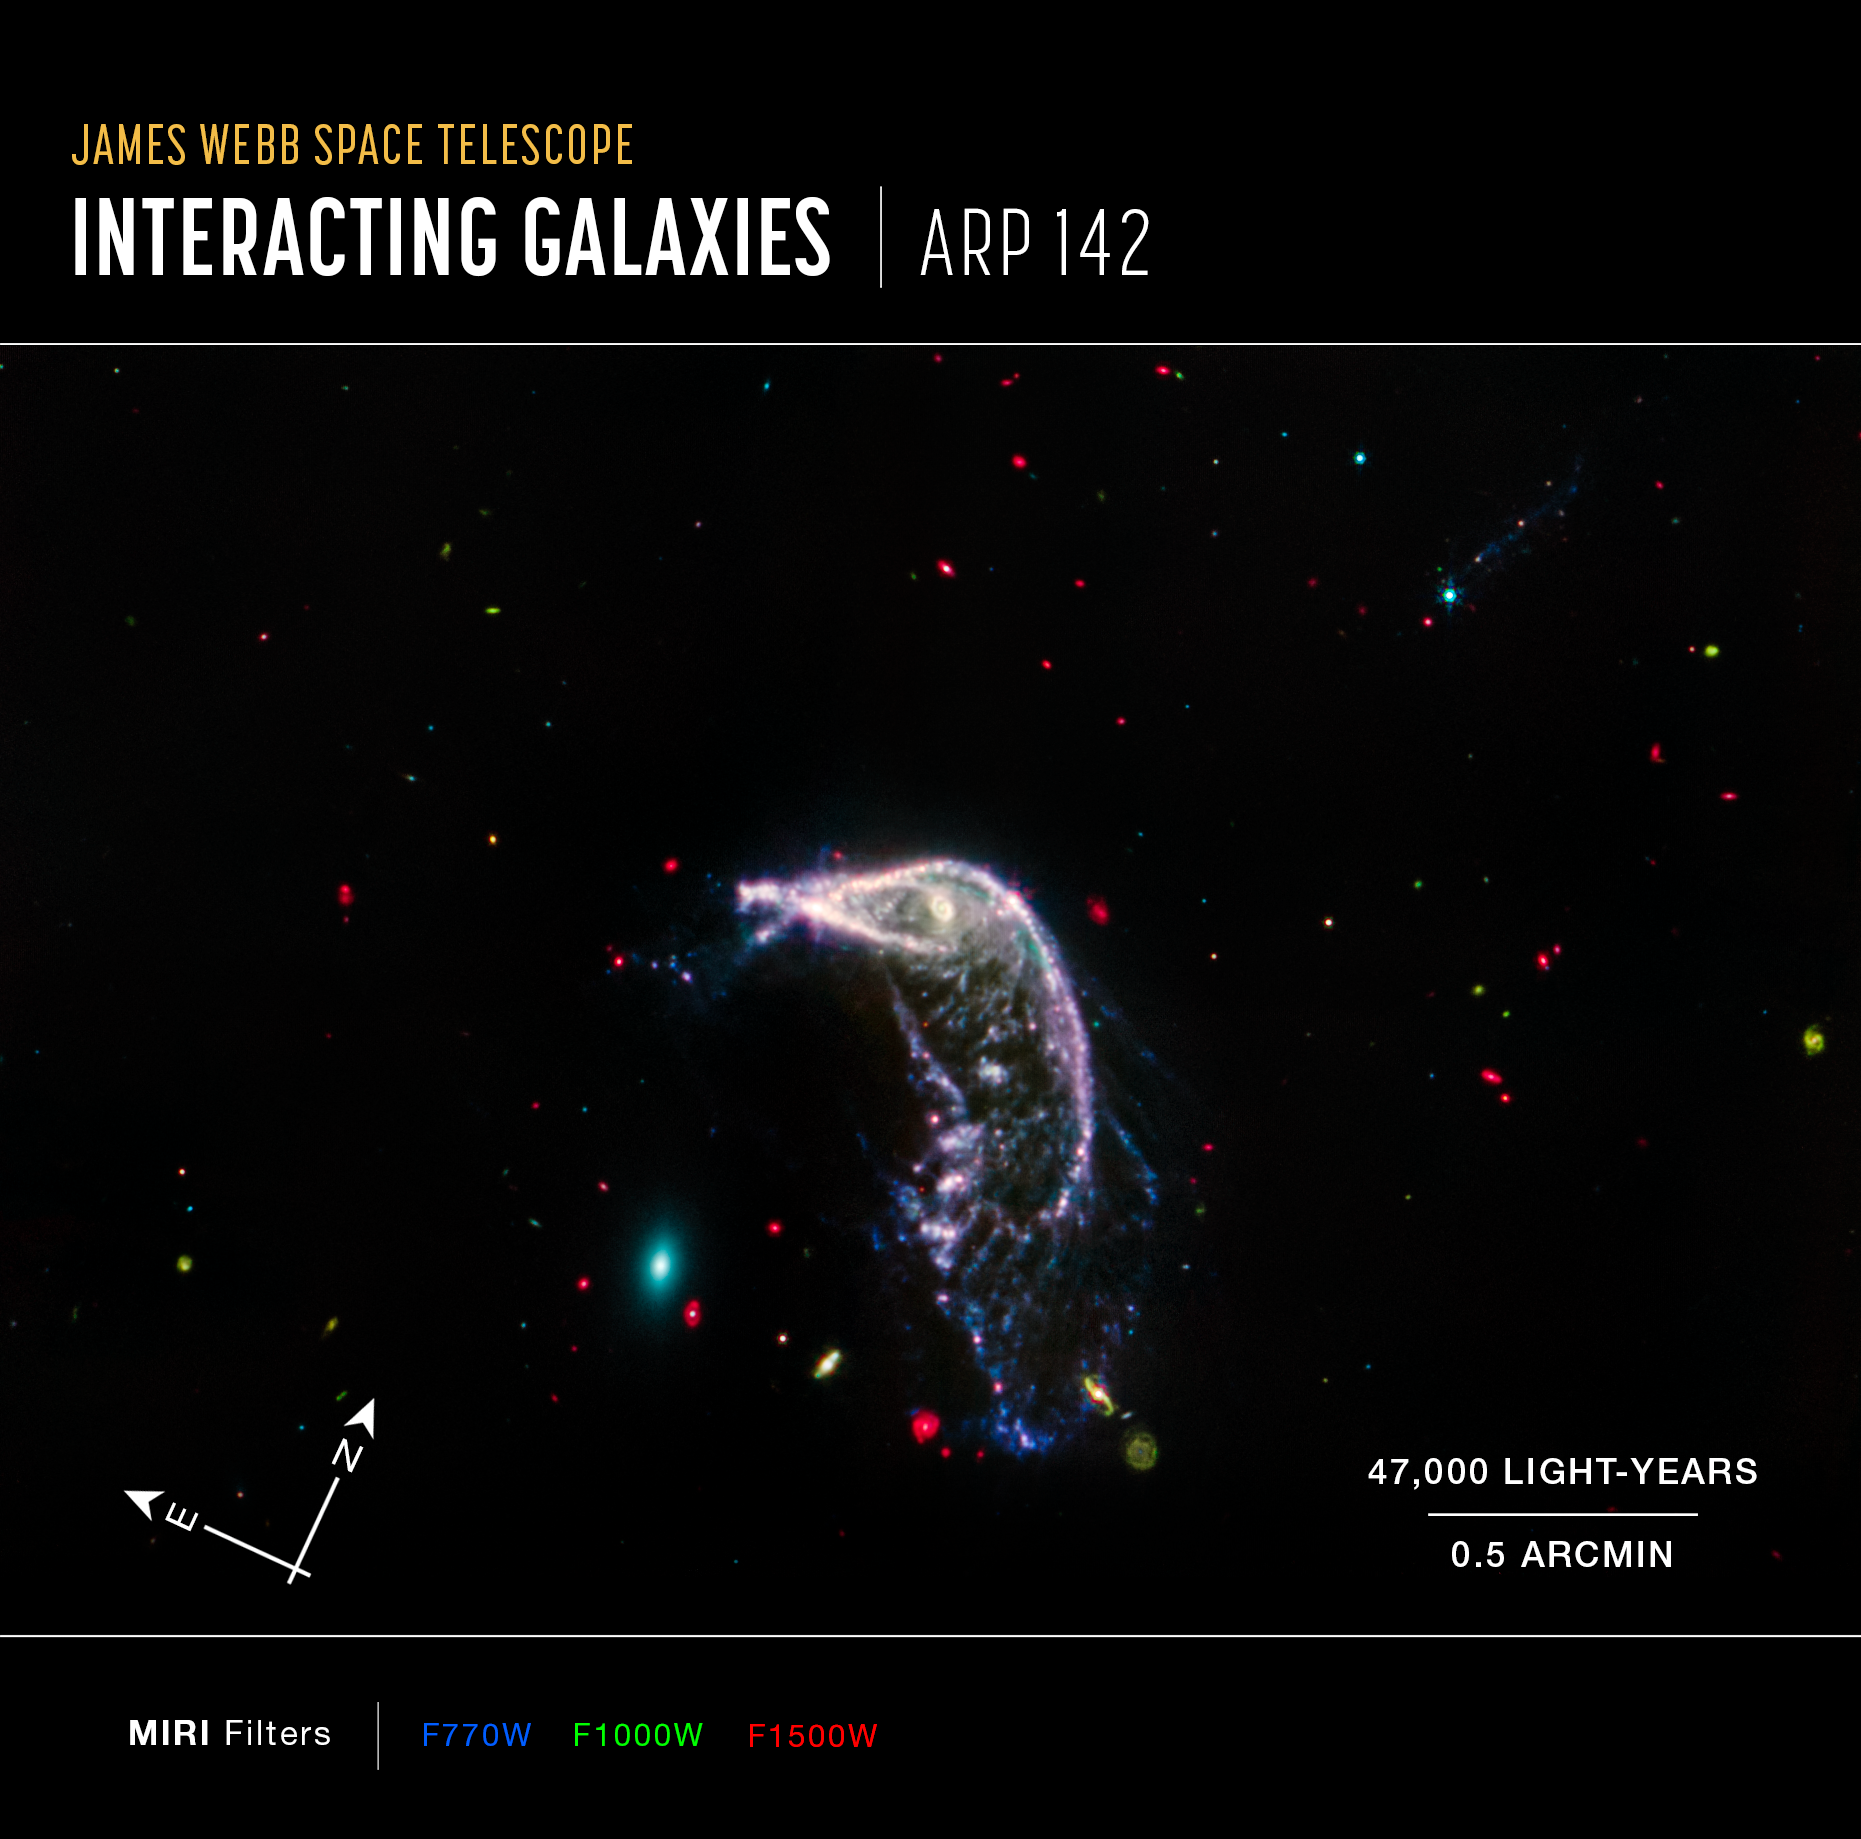

Interacting galaxies Arp 142 (MIRI image, annotated)

This image of interacting galaxies Arp 142, captured by the James Webb Space Telescope’s MIRI (Mid-Infrared Instrument), shows compass arrows, scale bar, and colour key for reference.

The north and east compass arrows show the orientation of the image on the sky. Note that the relationship between north and east on the sky (as seen from below) is flipped relative to direction arrows on a map of the ground (as seen from above).

The scale bar is labelled in light-years, which is the distance that light travels in one Earth-year. (It takes three years for light to travel a distance equal to the length of the scale bar.) One light-year is equal to about 9.46 trillion kilometres.

The scale bar is also labelled in arcminutes, which is a measure of angular distance on the sky. One arcsecond is equal to an angular measurement of 1/3600 of one degree. There are 60 arcminutes in a degree and 60 arcseconds in an arcminute. (The full Moon has an angular diameter of about 30 arcminutes.) The actual size of an object that covers one arcsecond on the sky depends on its distance from the telescope.

This image shows invisible near- and mid-infrared wavelengths of light that have been translated into visible-light colours. The colour key shows which NIRCam and MIRI filters were used when collecting the light. The name of each filter is the visible light colour used to represent the infrared light that passes through that filter.

Credit: NASA, ESA, CSA, STScI